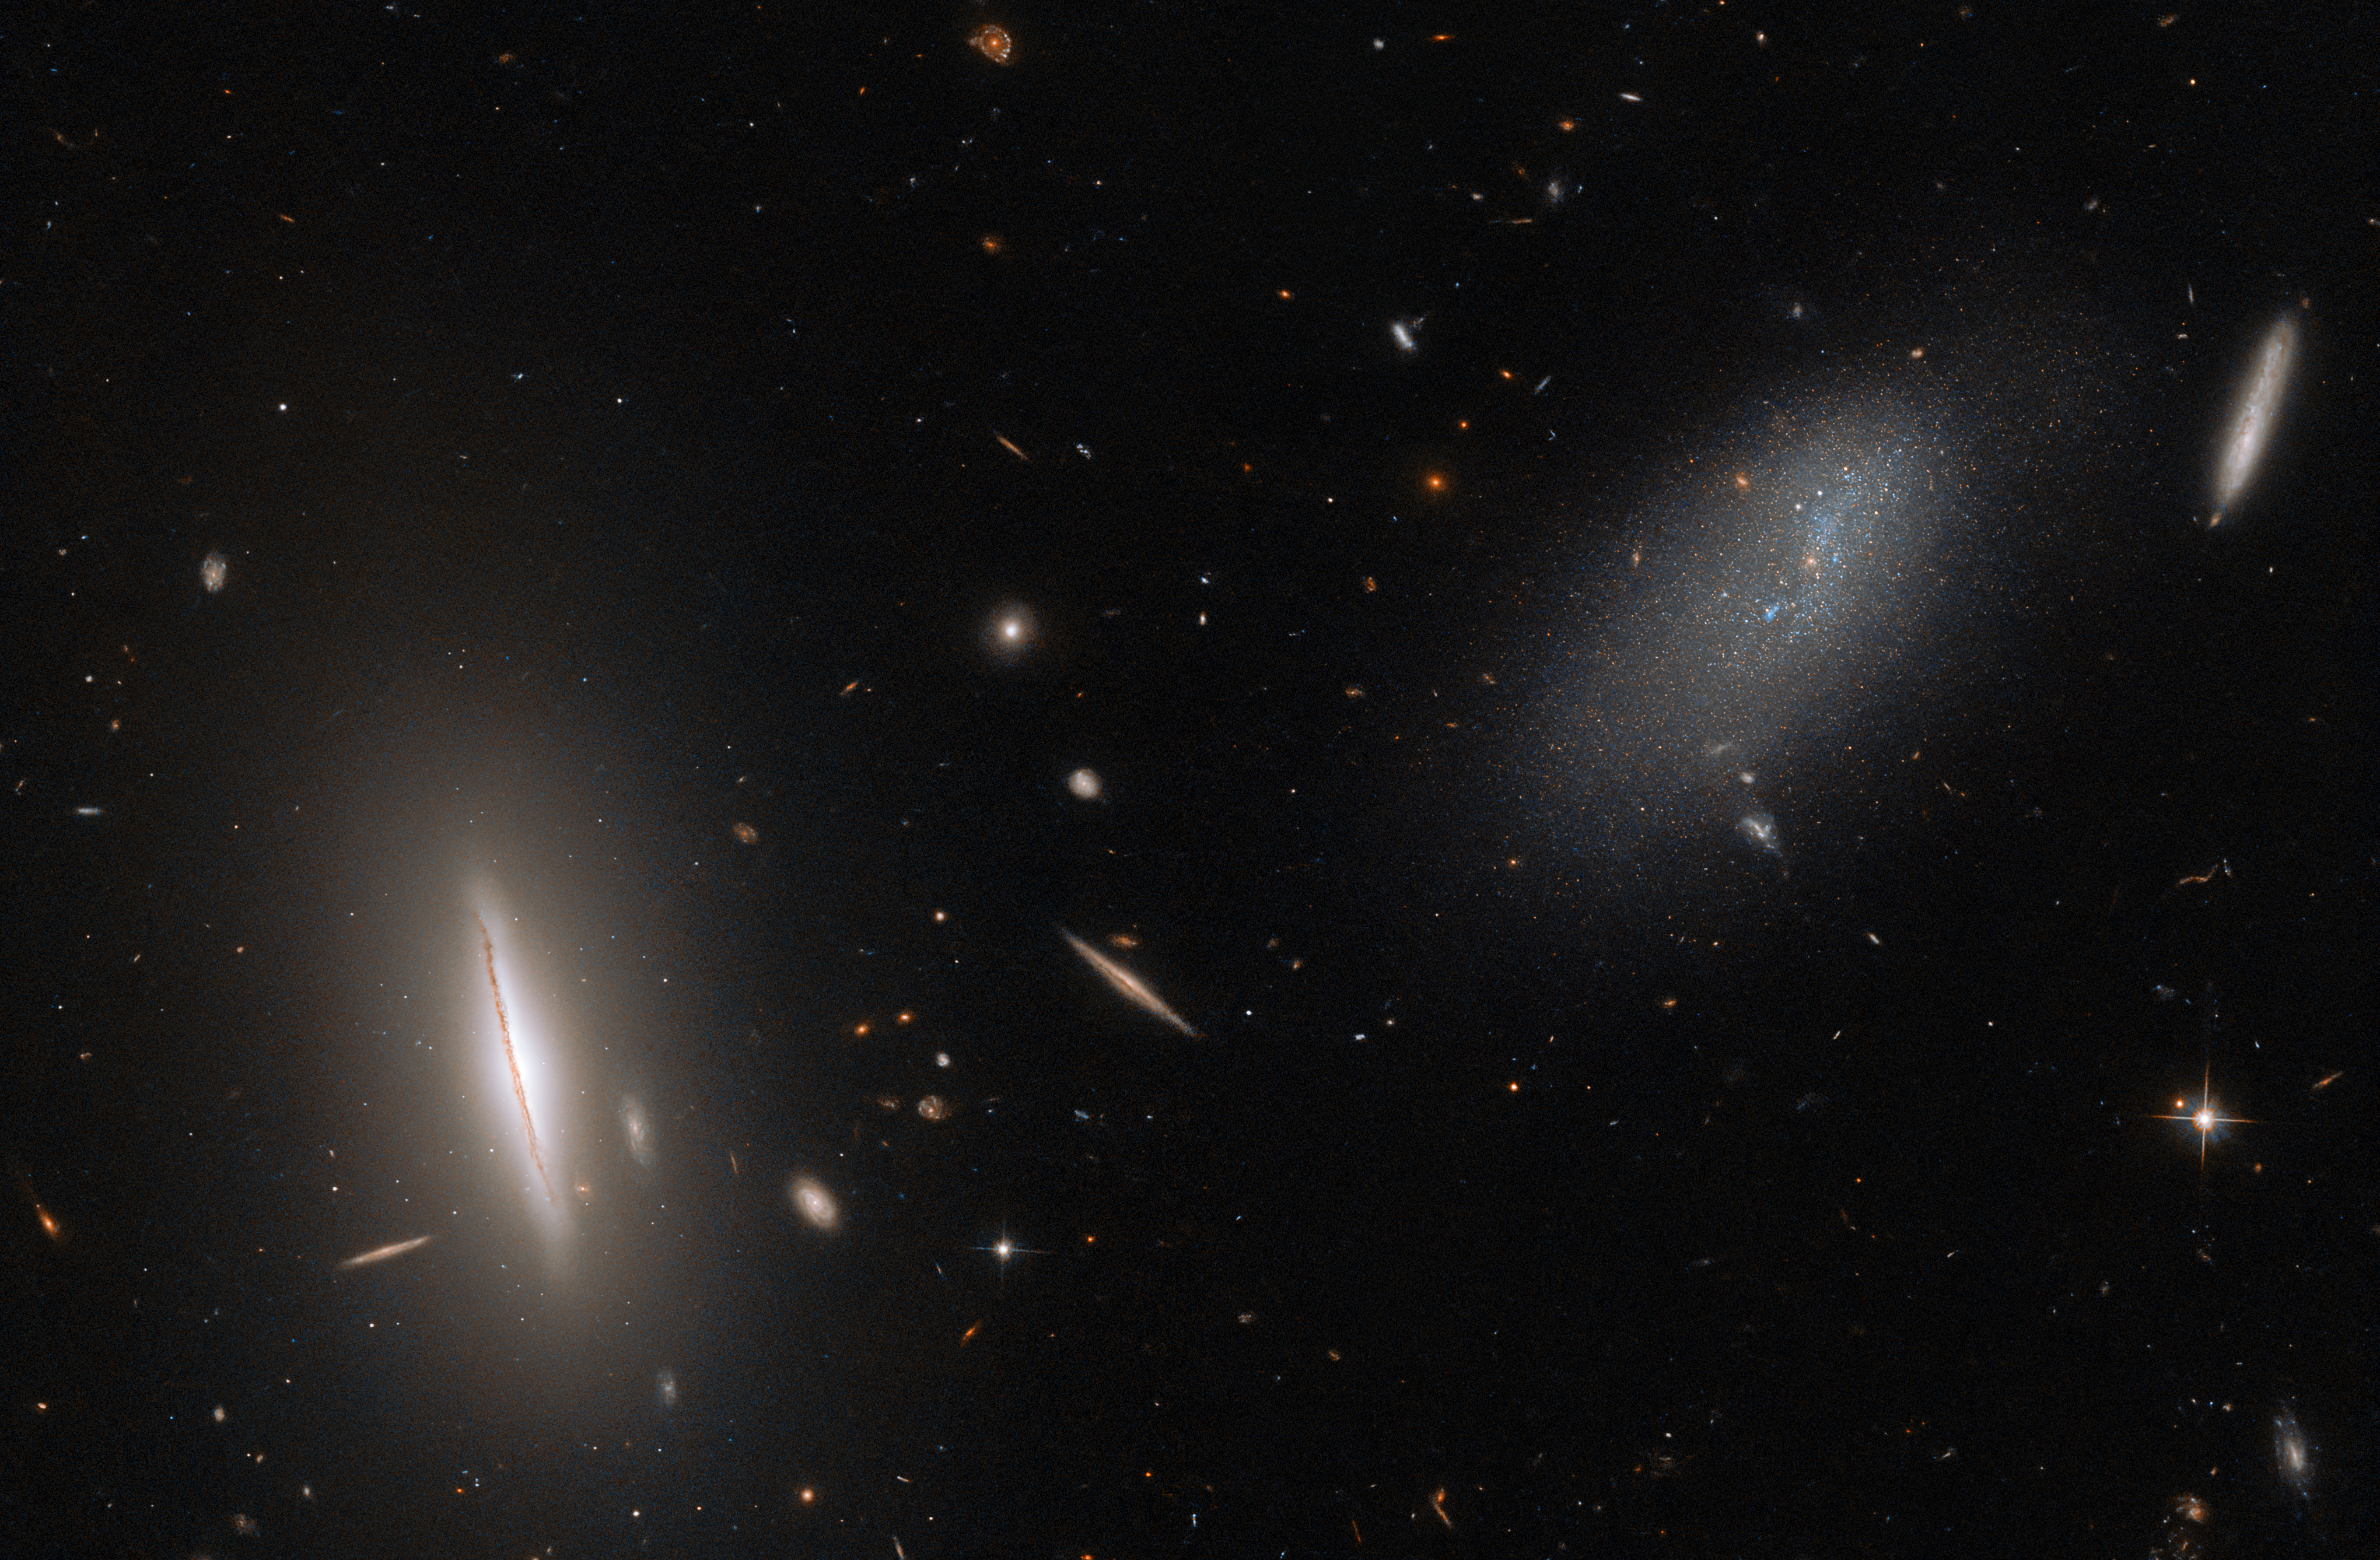

Calling on a Galactic Neighbour

This image from the NASA/ESA Hubble Space Telescope features the galaxy LEDA 48062 in the constellation Canes Venatici. LEDA 48062 is the faint, sparse, amorphous galaxy on the right side of this image, and it is accompanied by a more sharply defined neighbour on the left, the large, disc-like lenticular galaxy UGC 8603. A smattering of more distant galaxies also litter the background, and a handful of foreground stars are also visible throughout the image.

Have you ever wondered why the stars in Hubble images are surrounded by four sharp points? These are called diffraction spikes, and are created when starlight diffracts — or spreads around — the support structures inside reflecting telescopes like Hubble. The four spikes are due to the four thin vanes supporting Hubble’s secondary mirror and are only noticeable for bright objects like stars where a lot of light is concentrated on one spot. Darker, more spread-out objects like the galaxies LEDA 48062 and UGC 8603 do not possess visible diffraction spikes.

Hubble recently spent some time with our galactic neighbours. LEDA 48062 is only around 30 million light-years from the Milky Way, and was therefore included in the observing campaign Every Known Nearby Galaxy. The aim of this campaign was to observe precisely that: every known galaxy within 10 megaparsecs (around 33 million light-years) of the Milky Way. By getting to know our galactic neighbours, astronomers can determine what types of stars reside in various galaxies and also map out the local structure of the Universe.

Credit: ESA/Hubble & NASA, R. Tully